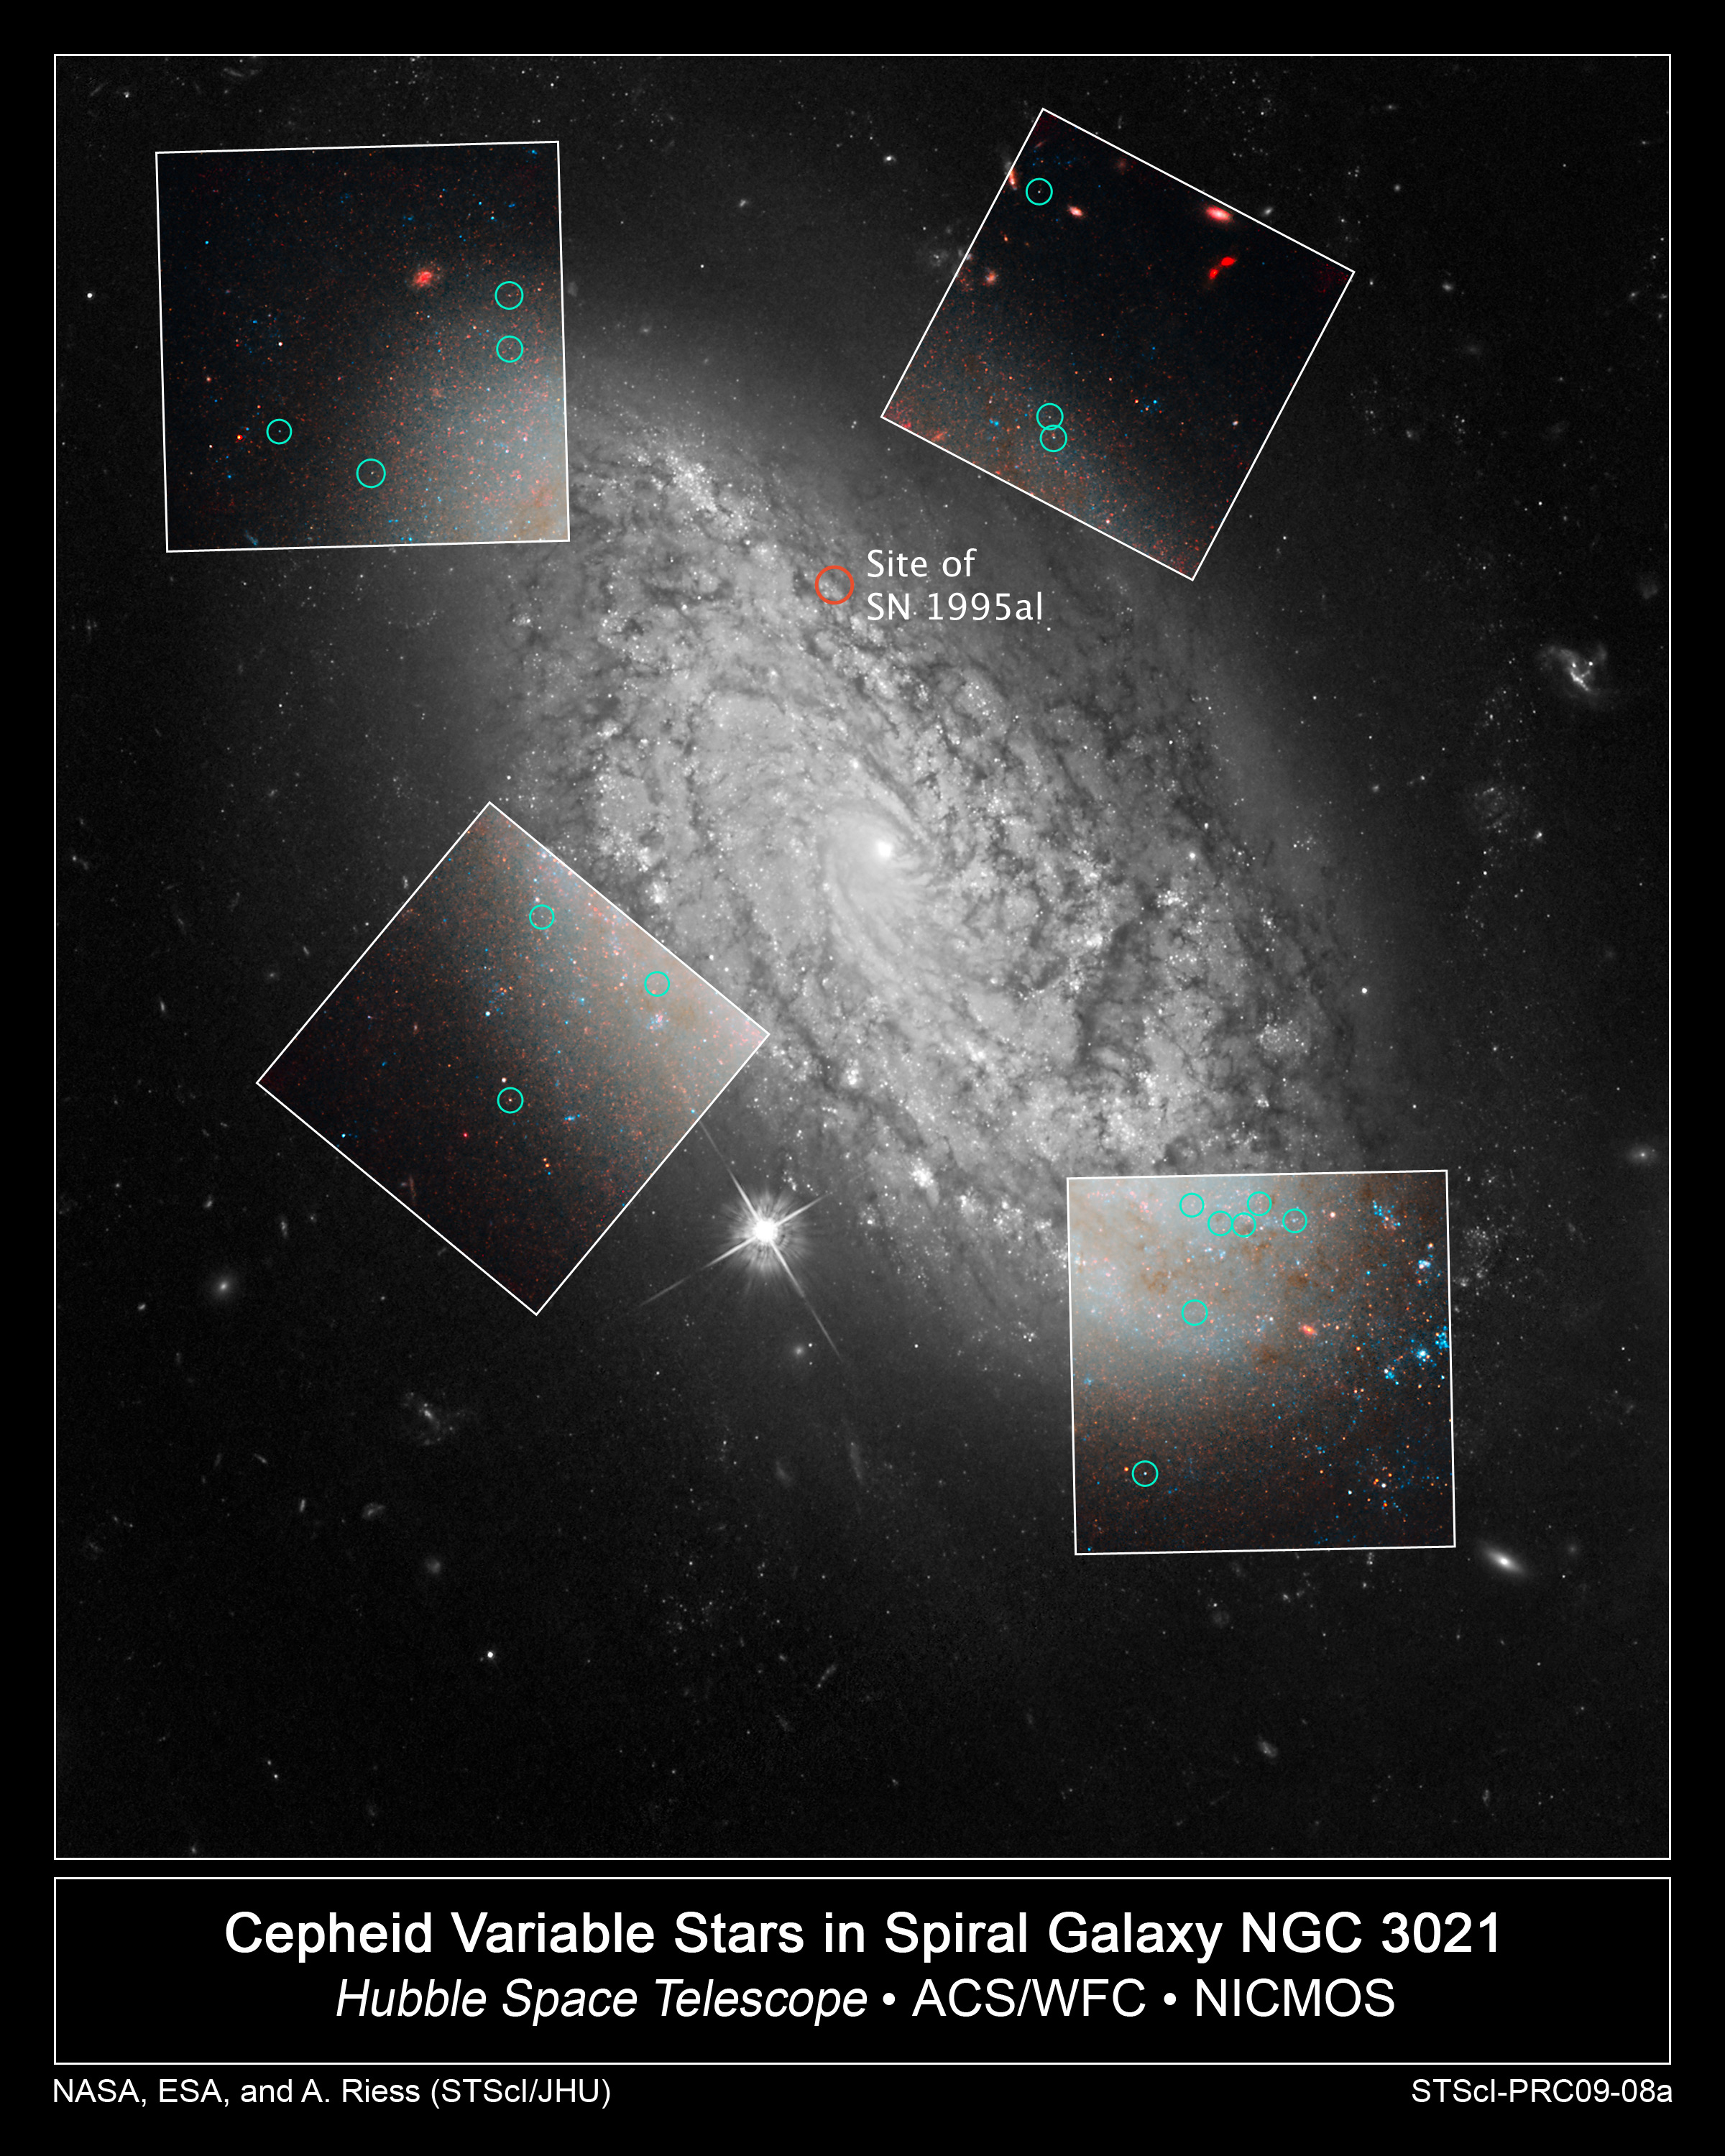

Cepheid variable stars in spiral galaxy NGC 3021

This is a NASA/ESA Hubble Space Telescope photo of the spiral galaxy NGC 3021. This was one of several hosts of recent Type Ia supernovae observed by astronomers to refine the measure of the universe's expansion rate, called the Hubble constant. Hubble made precise measurements of Cepheid variable stars in the galaxy, highlighted by green circles in the four inset boxes. These stars pulsate at a rate that is matched closely to their intrinsic brightness. This makes them ideal for measuring intergalactic distances. The Cepheids are used to calibrate an even brighter milepost marker that can be used over greater distances, a Type Ia supernova. The supernova was observed in the galaxy in 1995. The images in the boxes were taken with the Near Infrared Camera and Multi-Object Spectrometer (NICMOS).

Credit: NASA, ESA and A. Riess (STScI/JHU)